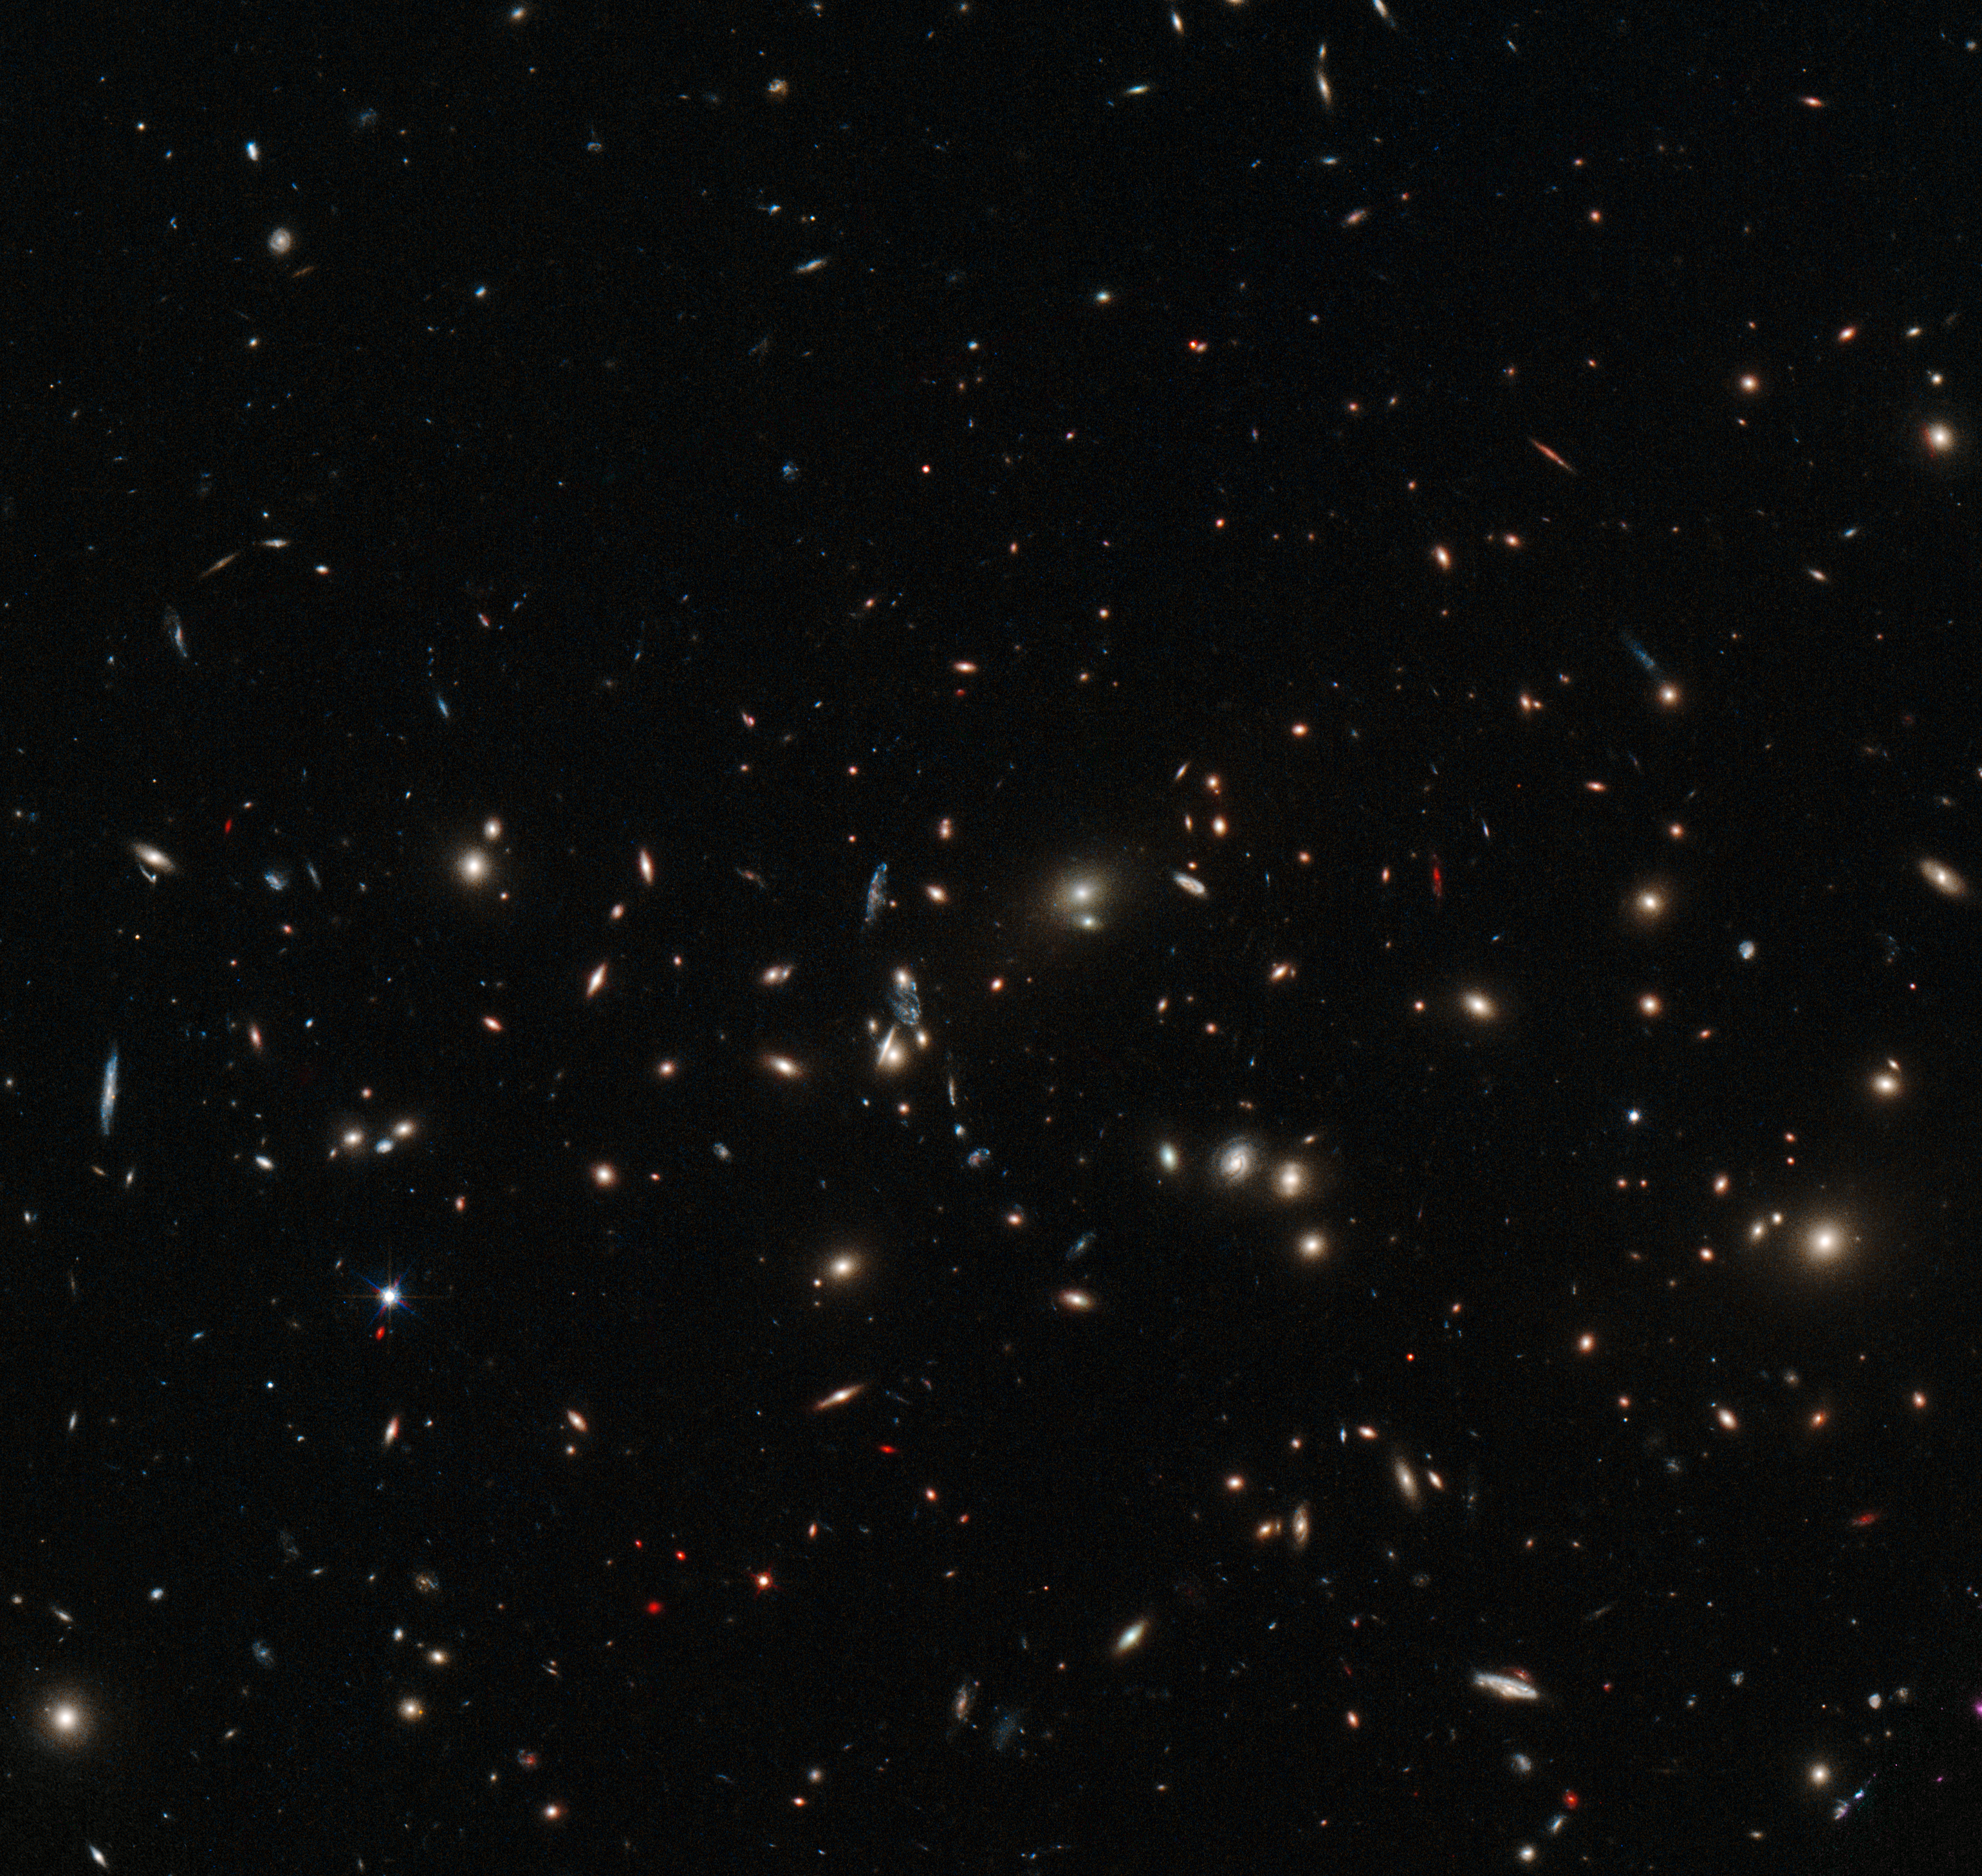

A scattering of spiral and elliptical galaxies

This image shows the massive galaxy cluster MACS J0152.5-2852, captured in detail by the NASA/ESA Hubble Space Telescope's Wide Field Camera 3. Almost every object seen here is a galaxy, each containing billions of stars. Galaxies are not usually randomly distributed in space, but instead appear in concentrations of hundreds, held together by their mutual gravity. Elliptical galaxies, like the yellow fuzzy objects seen in the image, are most often found close to the centres of galaxy clusters, while spirals, such as the bluish patches, are usually found to be further out and more isolated.

A version of this image obtained tenth prize in the Hubble's Hidden Treasures image processing competition, entered by contestant Judy Schmidt.

Credit: ESA/Hubble & NASA Acknowledgement: Judy Schmidt